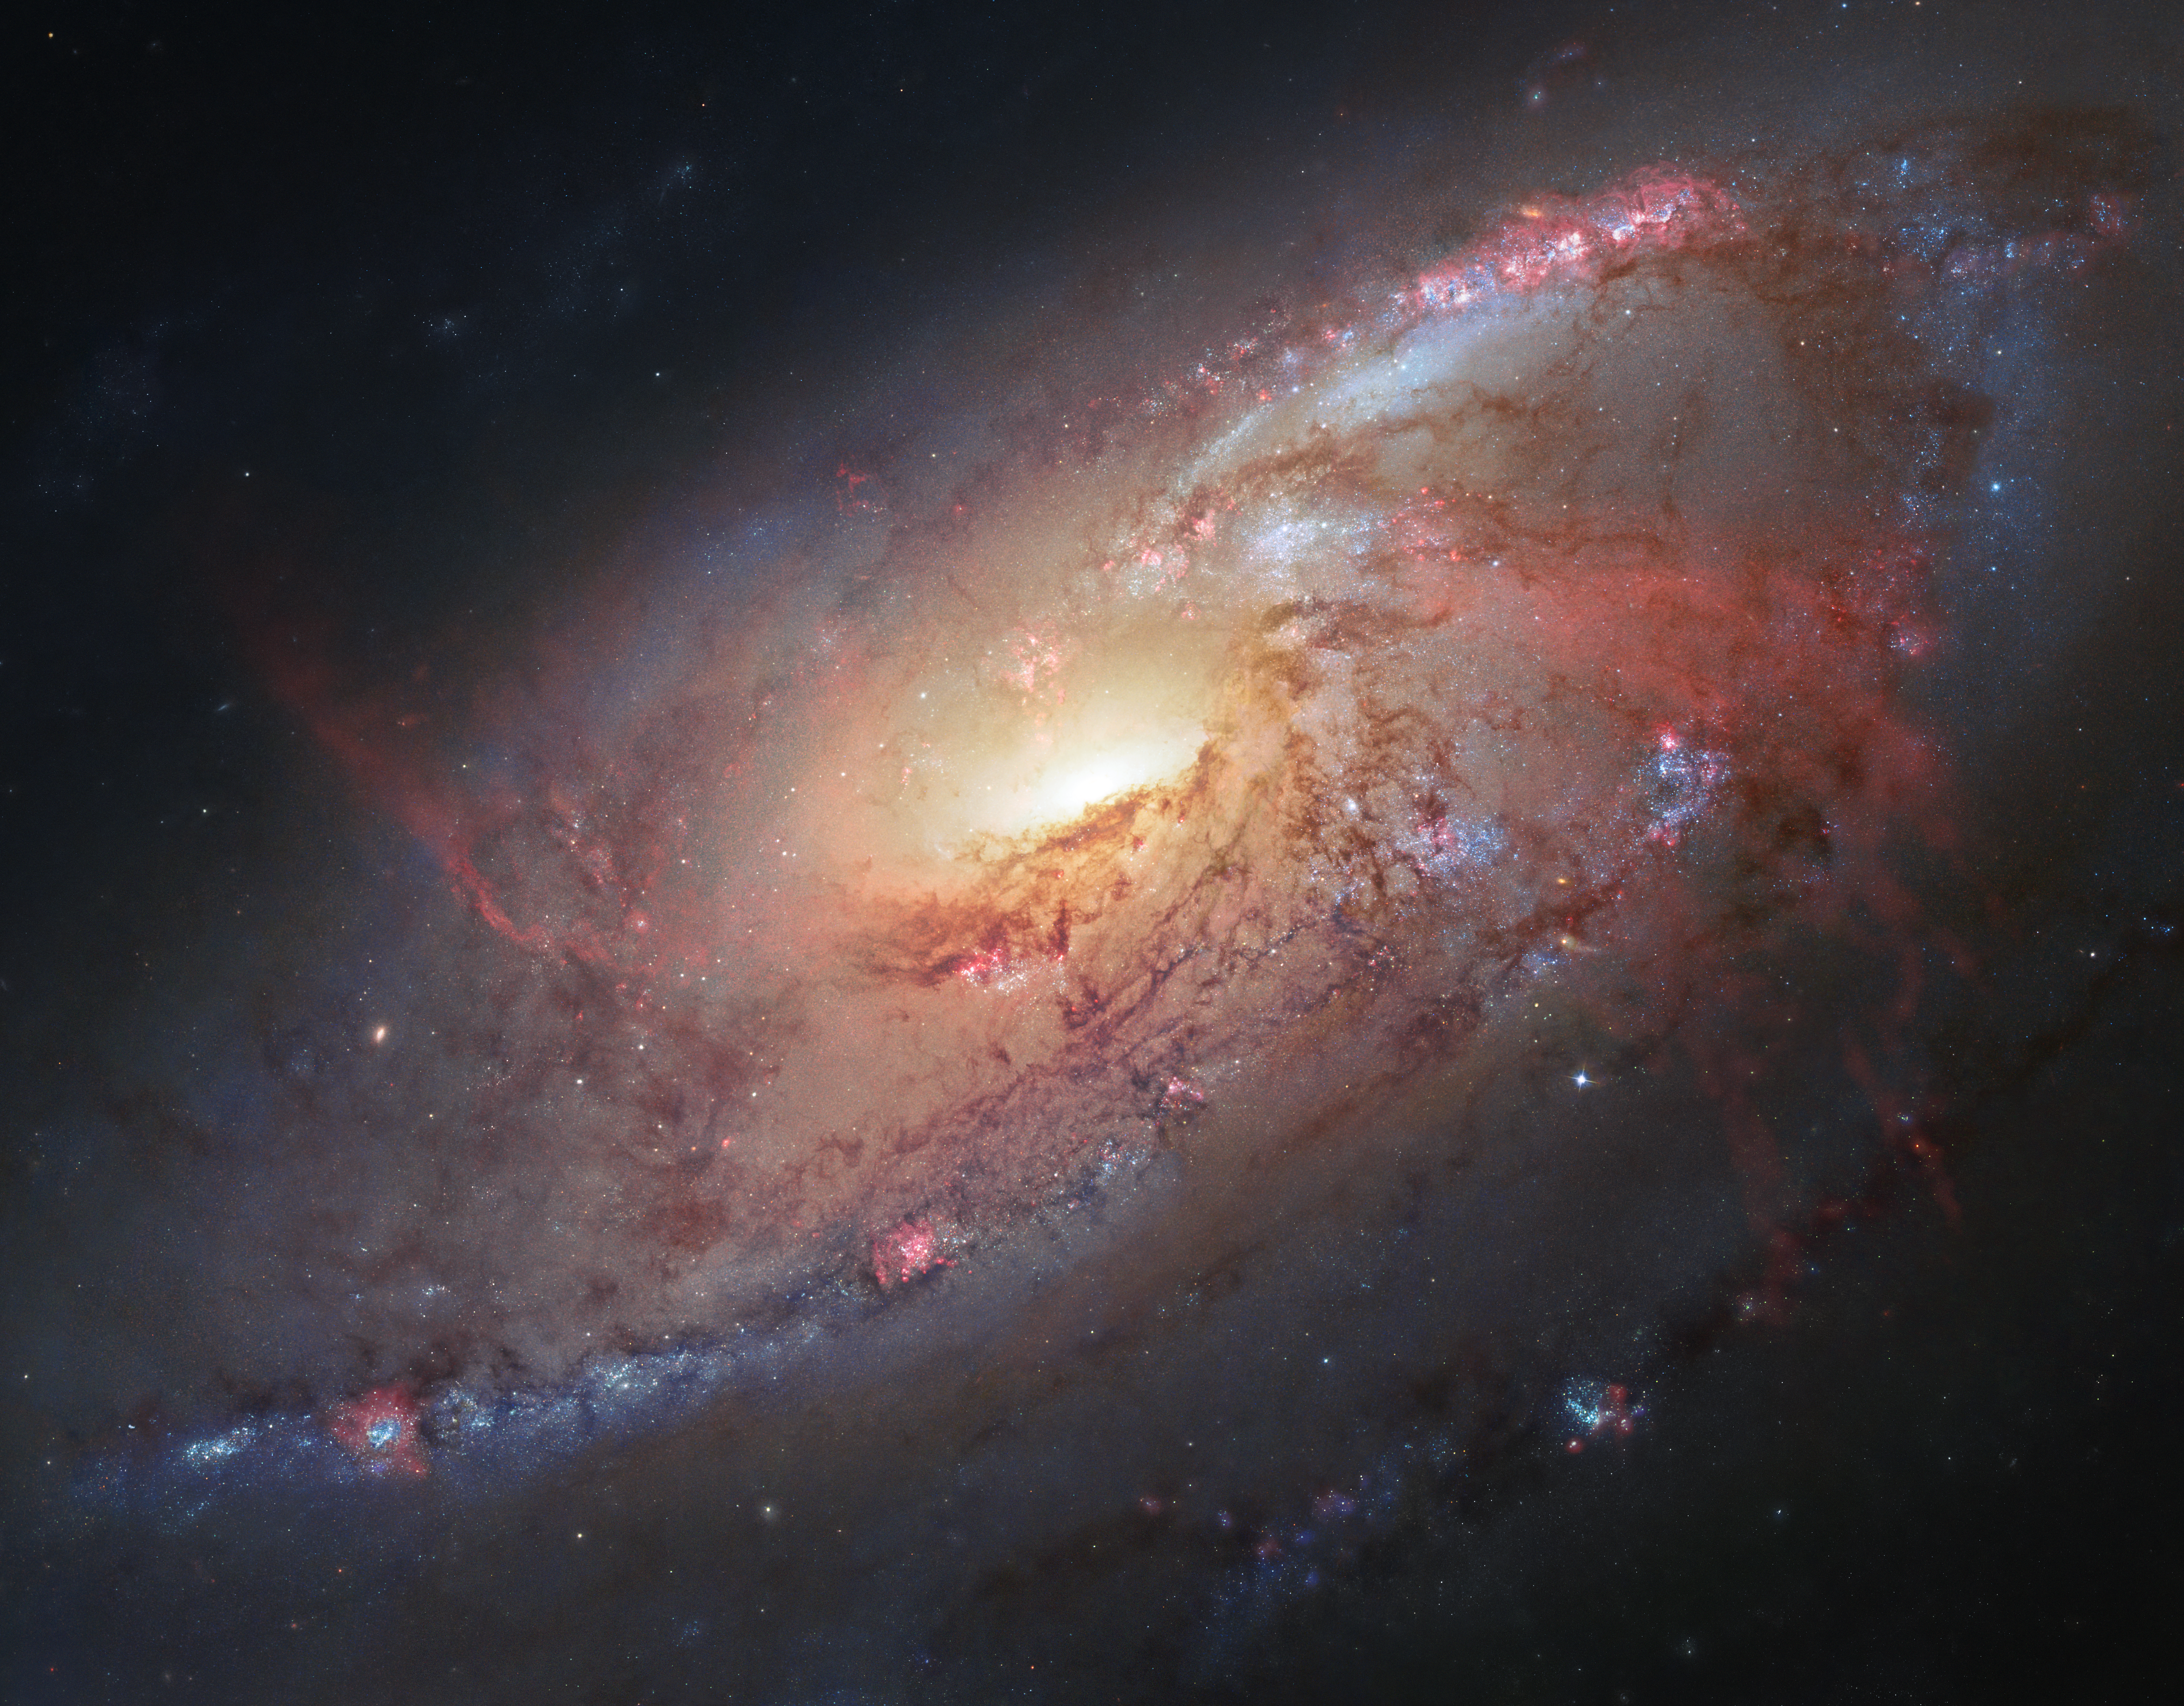

Hubble view of Messier 106

This image combines Hubble observations of Messier 106 with additional information captured by amateur astronomers Robert Gendler and Jay GaBany. Gendler combined Hubble data with his own observations to produce this stunning colour image.

Messier 106 is a relatively nearby spiral galaxy, a little over 20 million light-years away.

Credit: NASA, ESA, the Hubble Heritage Team (STScI/AURA), and R. Gendler (for the Hubble Heritage Team). Acknowledgment: J. GaBany